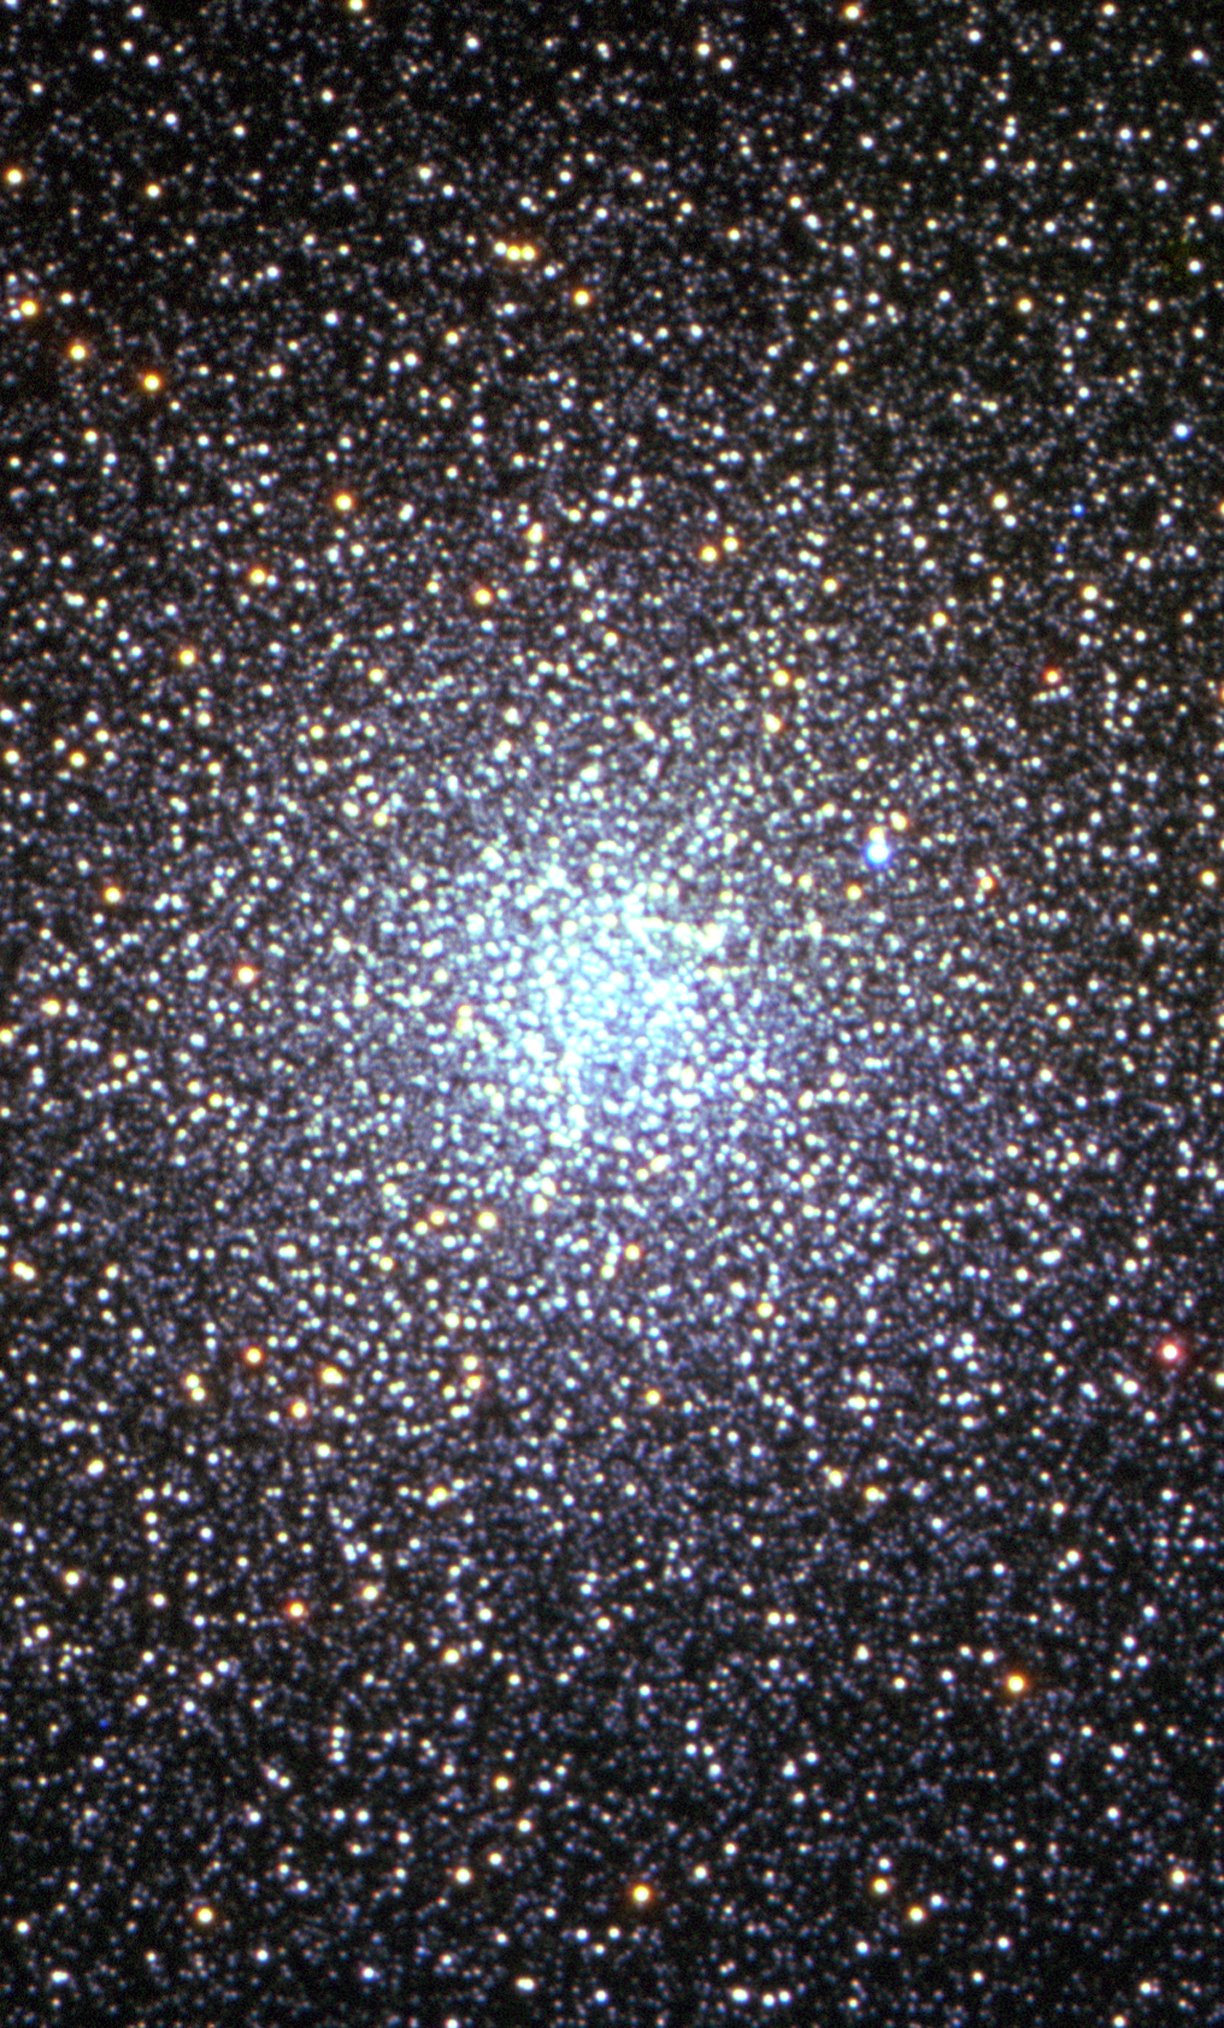

Globular cluster 47 Tucanae [VLT view]

A photo of the globular star cluster 47 Tucanae taken with the Very Large Telescope, in Chile. It is one of the densest globular clusters in the Southern hemisphere. The cluster contains one million stars.

Credit: Very Large Telescope/European Southern Observatory, R. Kotak and H. Boffin (ESO)